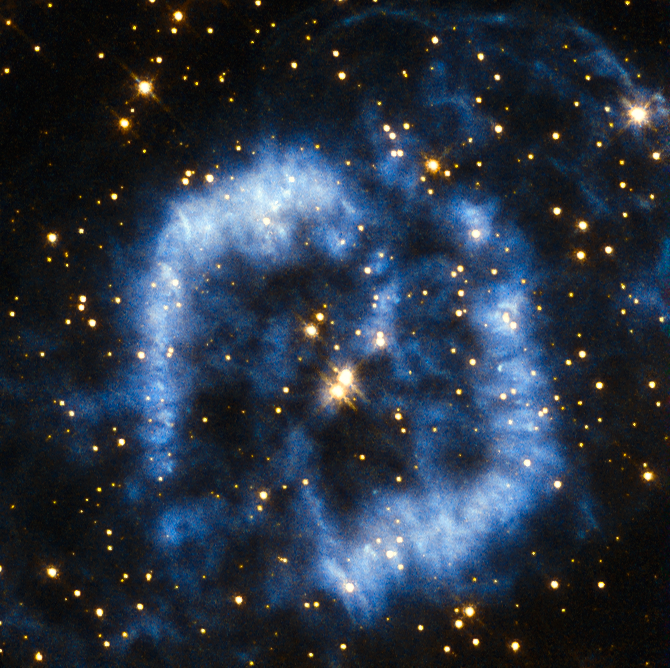

Waving goodbye

This planetary nebula is called PK 329-02.2 and is located in the constellation of Norma in the southern sky. It is also sometimes referred to as Menzel 2, or Mz 2, named after the astronomer Donald Menzel who discovered the nebula in 1922.

When stars that are around the mass of the Sun reach their final stages of life, they shed their outer layers into space, which appear as glowing clouds of gas called planetary nebulae. The ejection of mass in stellar burnout is irregular and not symmetrical, so that planetary nebulae can have very complex shapes. In the case of Menzel 2 the nebula forms a winding blue cloud that perfectly aligns with two stars at its centre. In 1999 astronomers discovered that the star at the upper right is in fact the central star of the nebula, and the star to the lower left is probably a true physical companion of the central star.

For tens of thousands of years the stellar core will be cocooned in spectacular clouds of gas and then, over a period of a few thousand years, the gas will fade away into the depths of the Universe. The curving structure of Menzel 2 resembles a last goodbye before the star reaches its final stage of retirement as a white dwarf.

A version of this image was entered into the Hubble's Hidden Treasures image processing competition by contestant Serge Meunier.

Credit: ESA/Hubble & NASA Acknowledgement: Serge Meunier